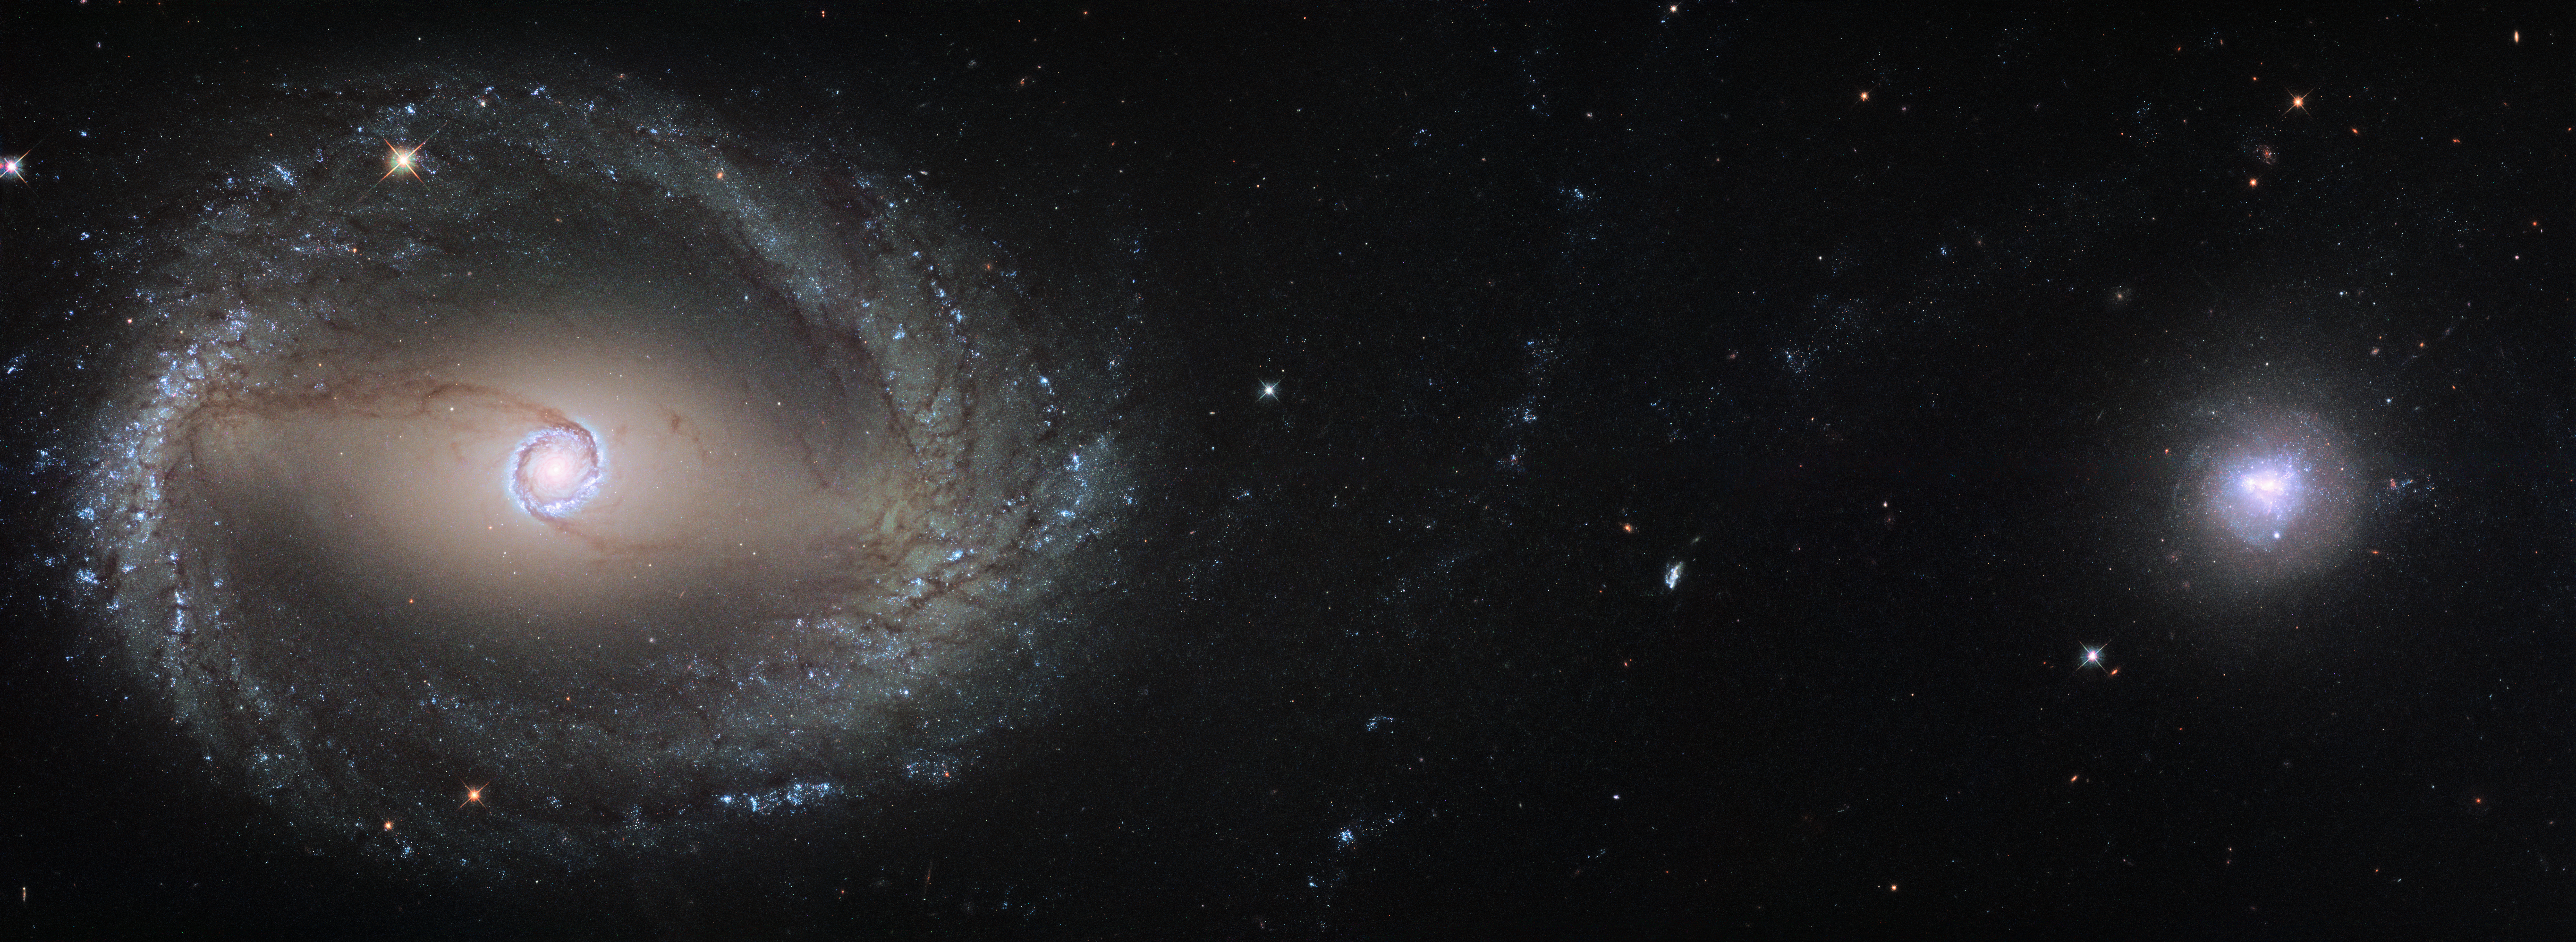

NGC 1512 and NGC 1510

This composite image, created out of two different pointings from Hubble, shows the barred spiral galaxy NGC 1512 (left) and the dwarf galaxy NGC 1510 (right). Both galaxies are about 30 million light-years away from Earth and currently in the process of merging. At the end of this process NGC 1512 will have cannibalised its smaller companion.

Credit: ESA/Hubble, NASA